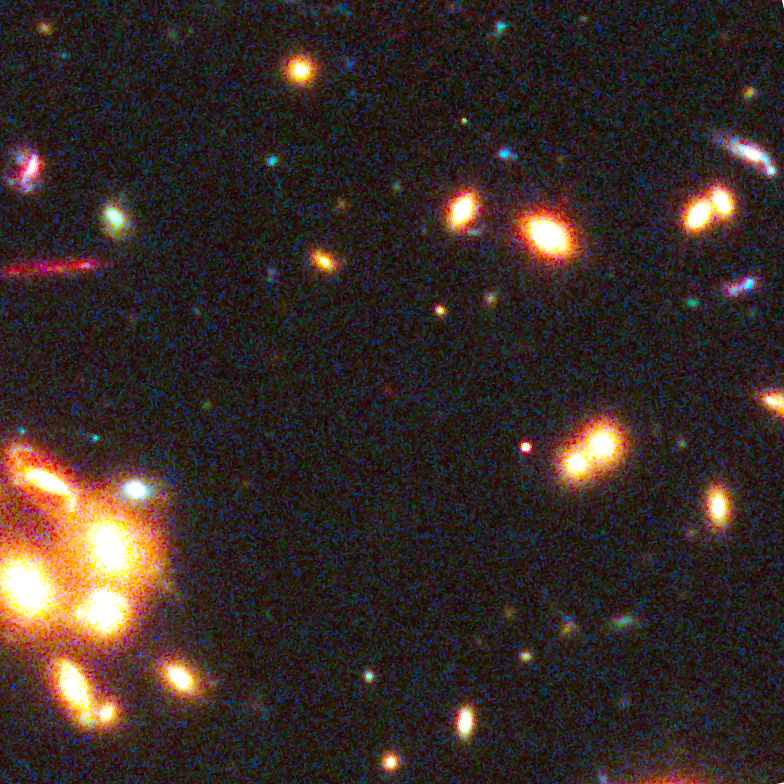

Location of galaxy candidate MACS1149-JD

The red dot in the centre of this image is the newfound galaxy MACS1149-JD observed using the combined power of NASA's Spitzer and Hubble space telescopes, as well as a cosmic magnification effect. MACS1149-JD could be the most distant galaxy ever observed and opens a window onto the deepest, most remote epochs of cosmic history.

Credit: NASA, ESA, W. Zheng (JHU), M. Postman (STScI), and the CLASH Team